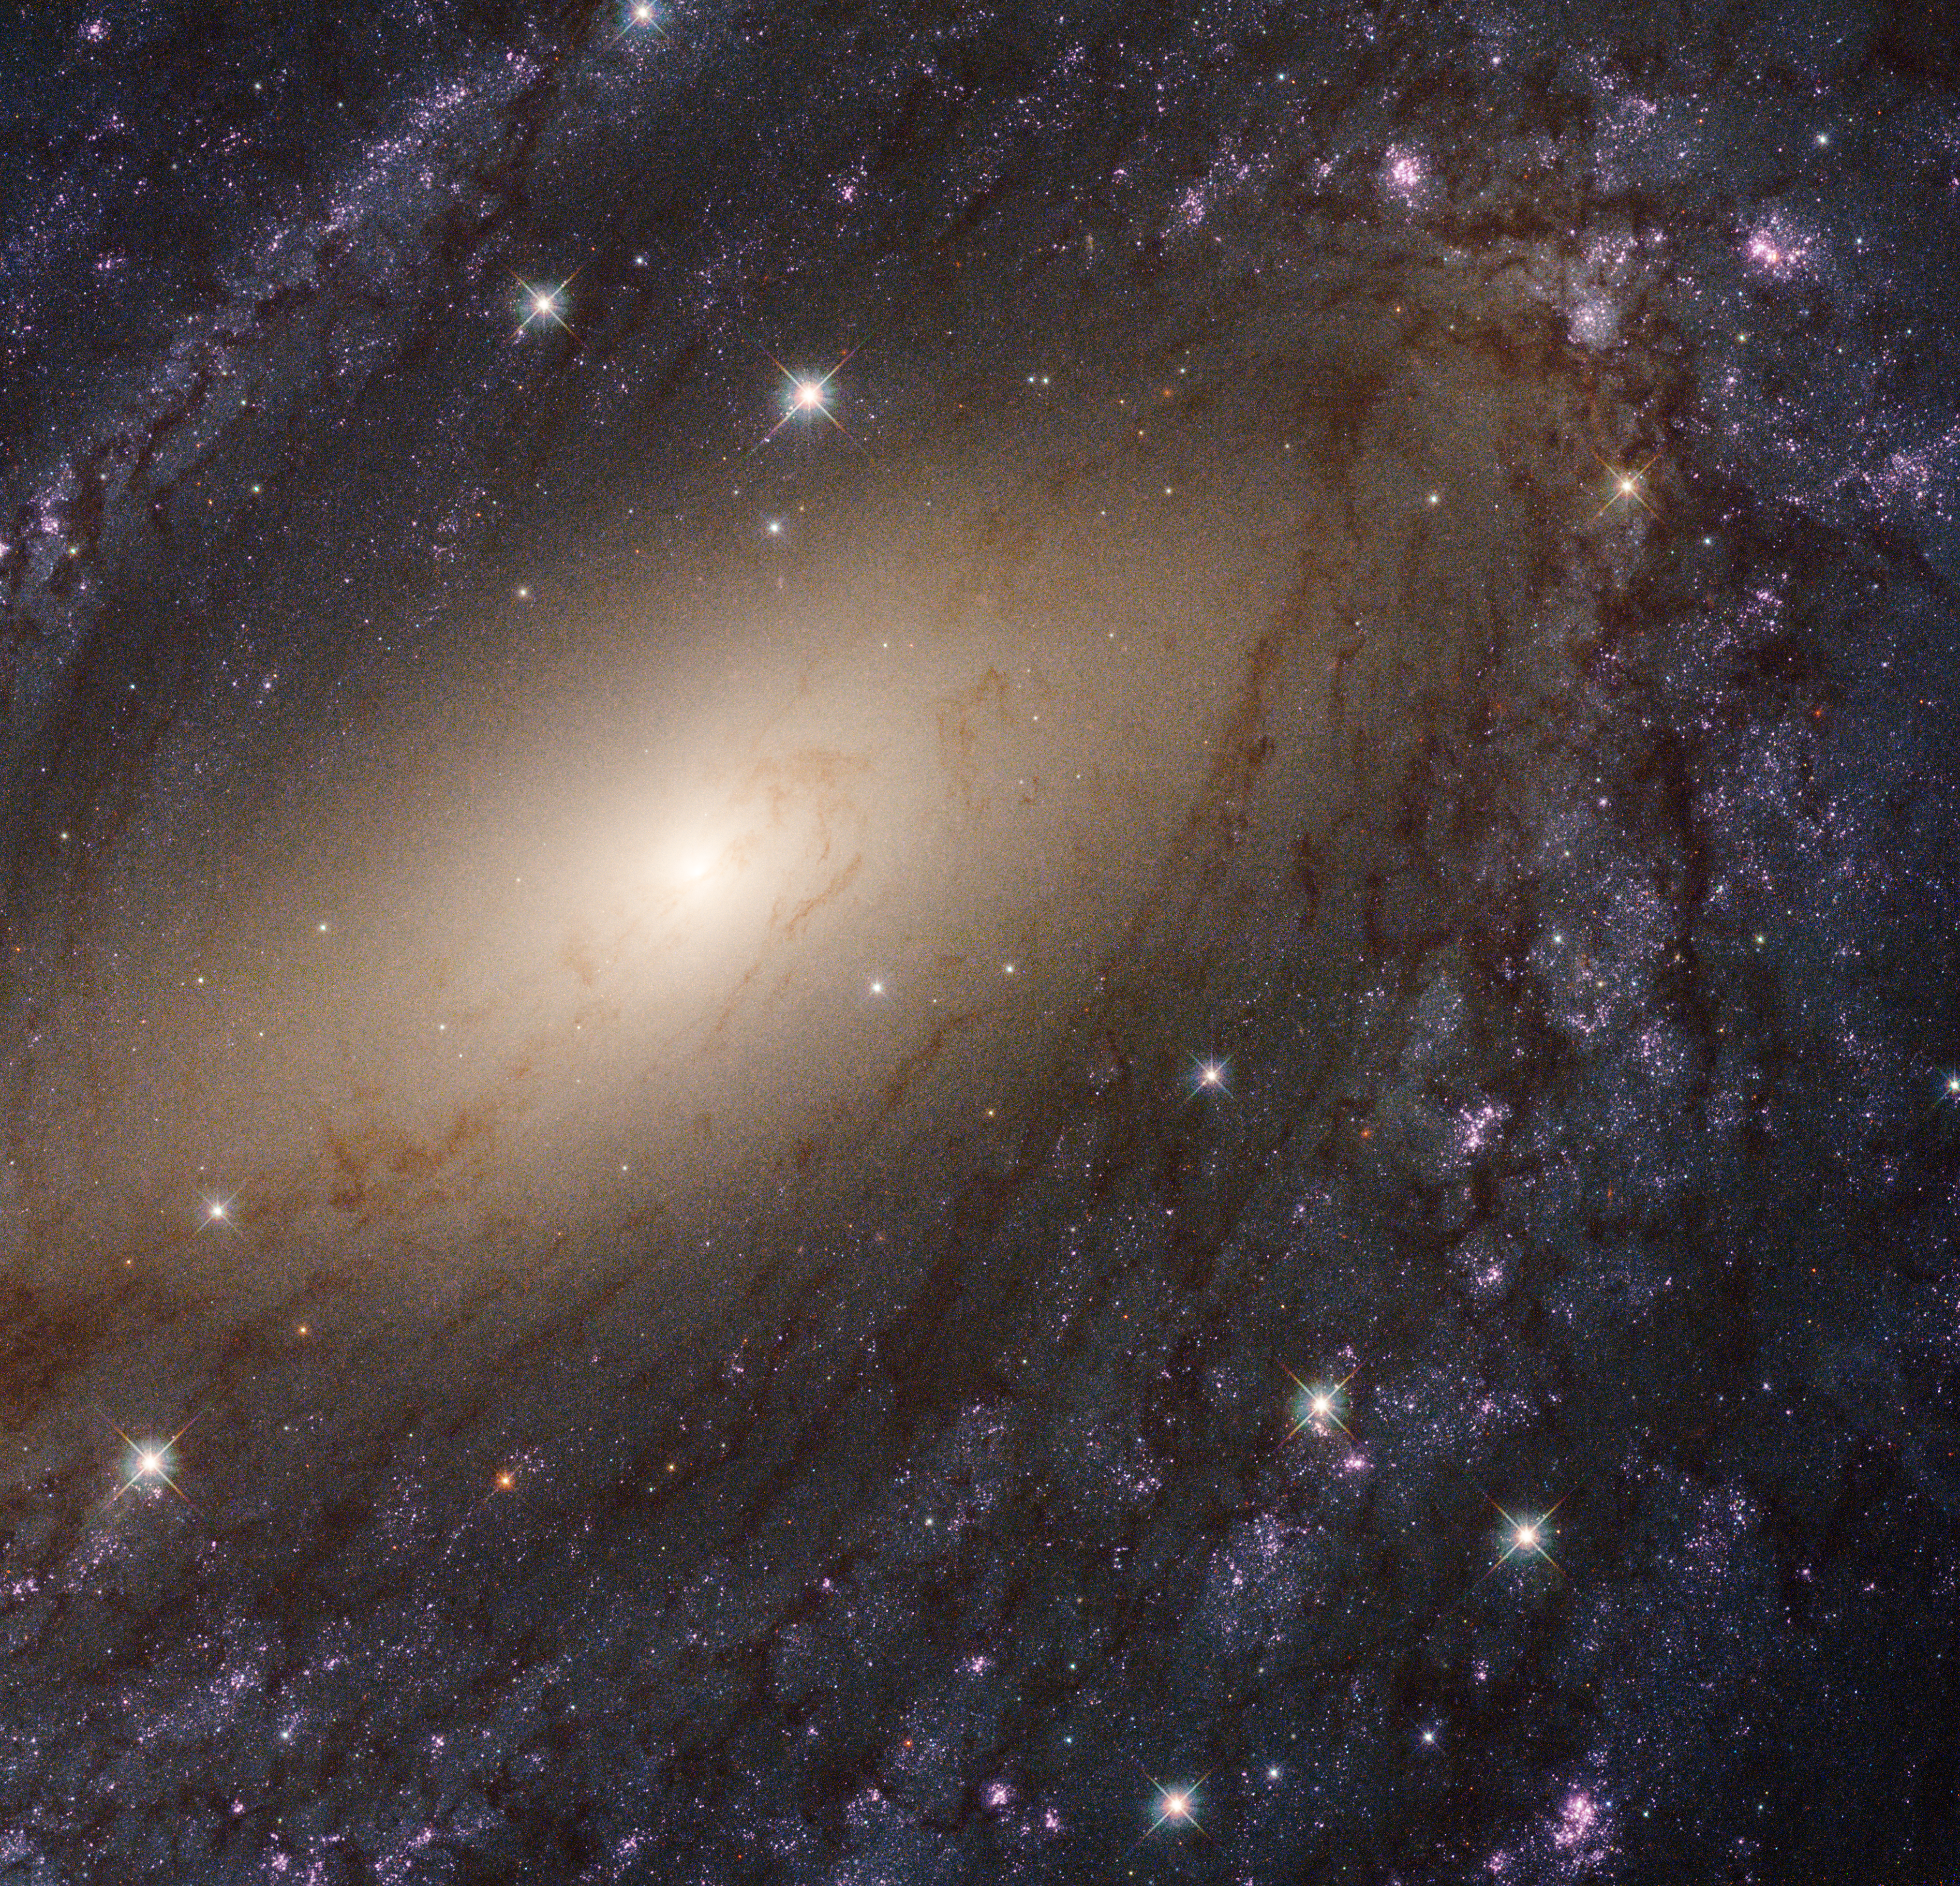

The glowing spiral arms of NGC 6744

This image shows the galaxy NGC 6744, about 30 million light-years away. It is one of 50 galaxies observed as part of the Hubble Space Telescope’s Legacy ExtraGalactic UV Survey (LEGUS), the sharpest, most comprehensive ultraviolet-light survey of star-forming galaxies in the nearby Universe, offering an extensive resource for understanding the complexities of star formation and galaxy evolution.

The image is a composite using both ultraviolet light and visible light, gathered with Hubble’s Wide Field Camera 3 and Advanced Camera for Surveys.

Credit: NASA, ESA, and the LEGUS team